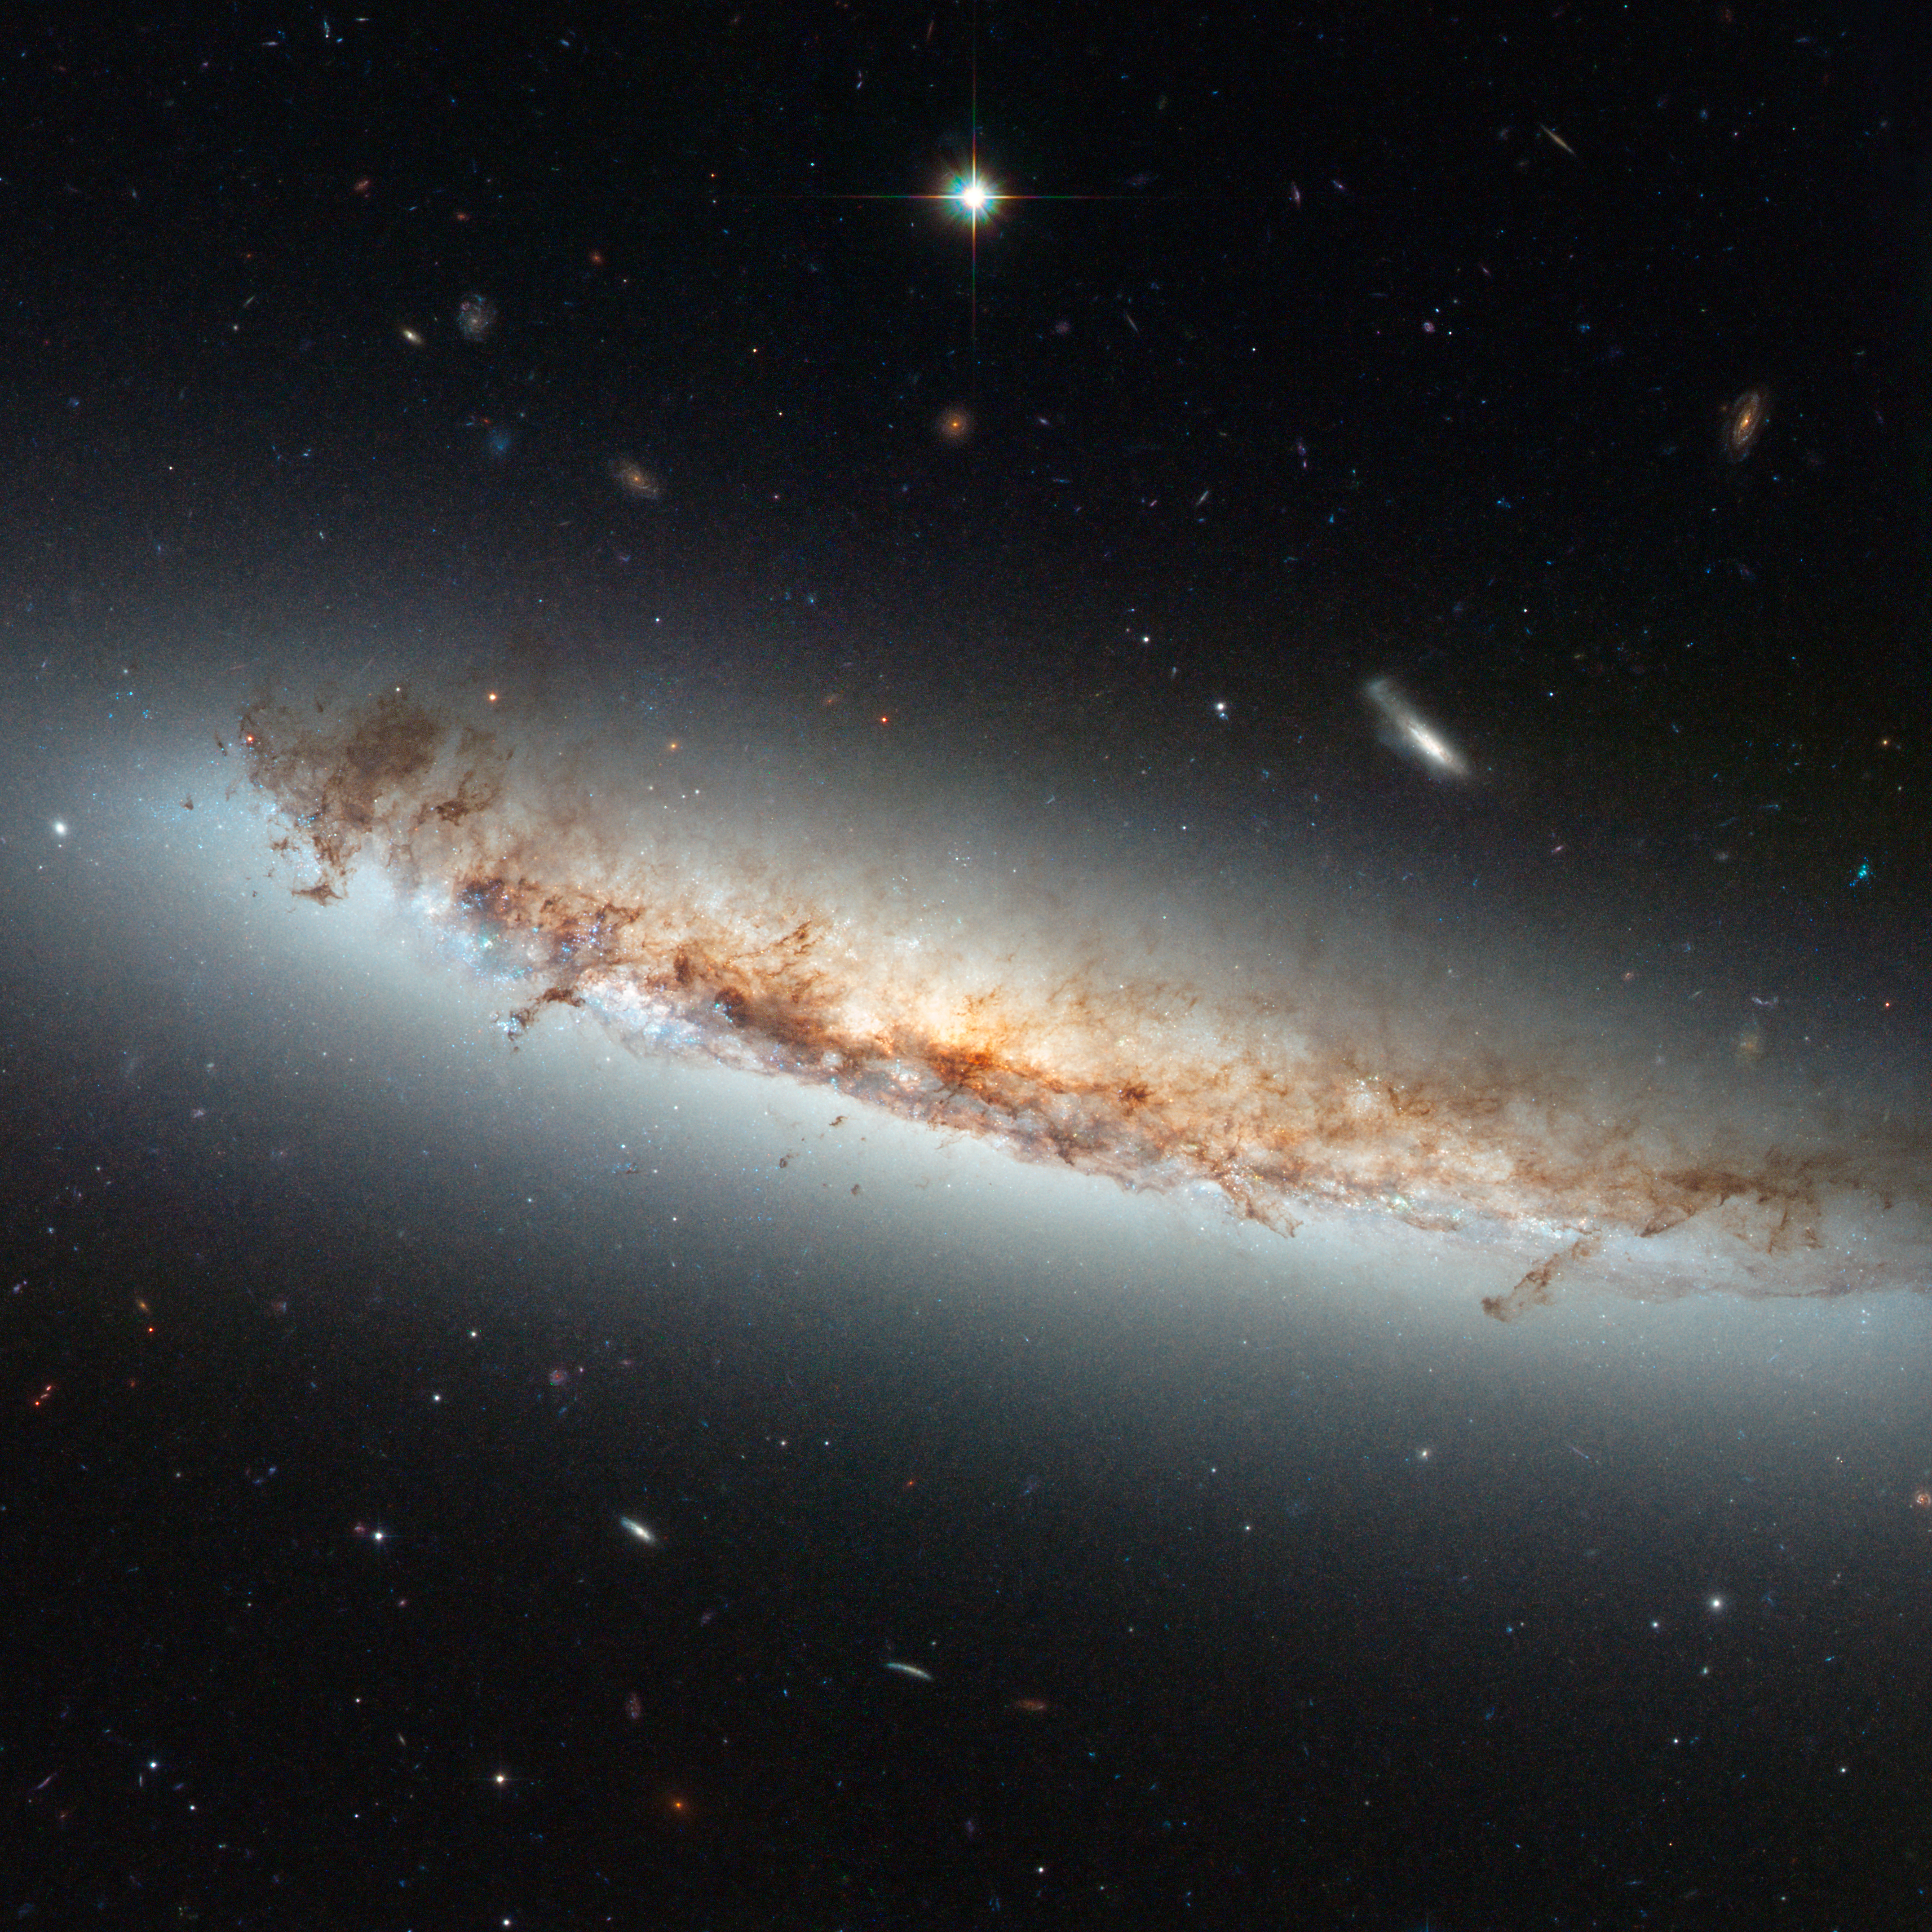

Hubble views NGC 4402

The image of NGC 4402 highlights some telltale signs of ram pressure stripping such as the curved, or convex, appearance of the disc of gas and dust, a result of the forces exerted by the heated gas. Light being emitted by the disc backlights the swirling dust that is being swept out by the gas. Studying ram pressure stripping helps astronomers better understand the mechanisms that drive the evolution of galaxies, and how the rate of star formation is suppressed in very dense regions of the Universe like clusters.

Credit: NASA & ESA